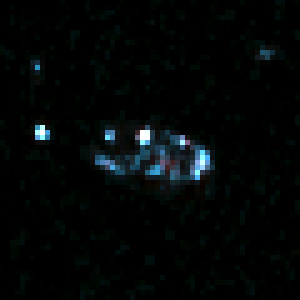

Comparative View of Galaxy's Stellar Populations

In the visible-light picture, taken with the Wide Field and Planetary Camera 2(WFPC2) in 1995, the galaxy looks uncharacteristically lumpy. That's because only the bright blue knots of starbirth are detected by the WFPC2.

Credit: Rodger I. Thompson (University of Arizona), and NASA/ESA